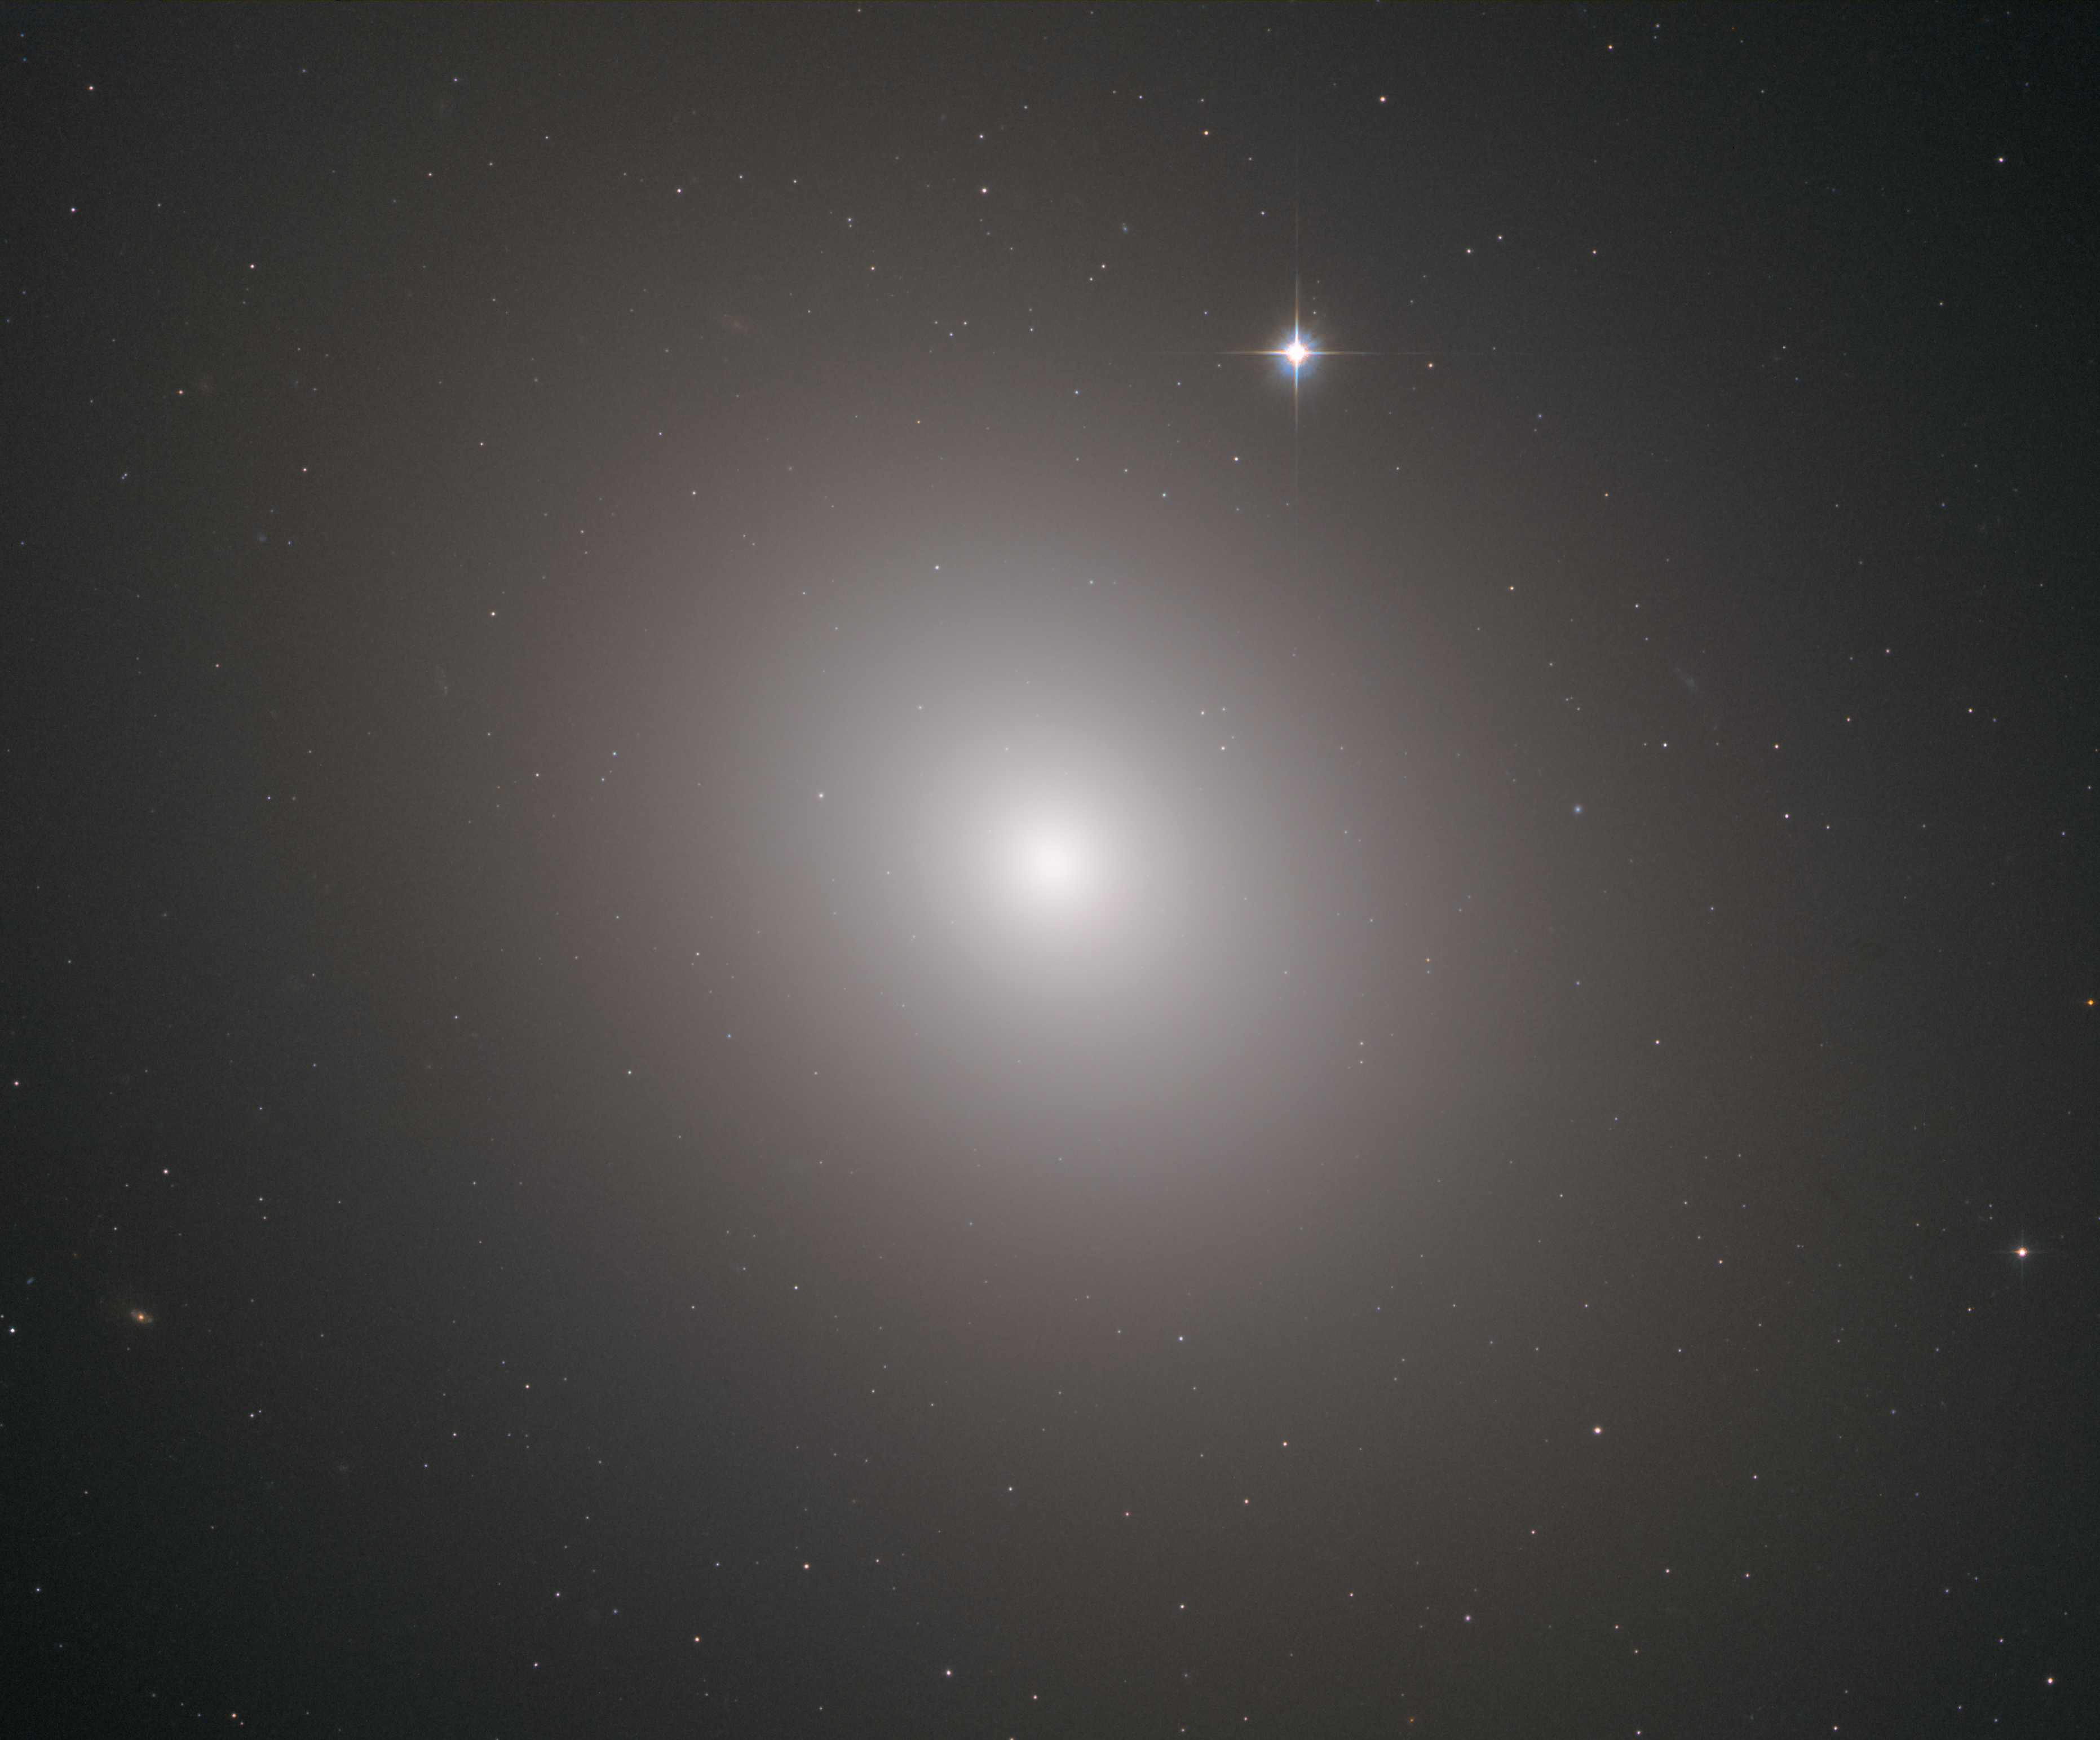

Invisible X-rays

This fuzzy orb of light is a giant elliptical galaxy filled with an incredible 200 billion stars. Unlike spiral galaxies, which have a well-defined structure and boast picturesque spiral arms, elliptical galaxies appear fairly smooth and featureless. This is likely why this galaxy, named Messier 49, was discovered by French astronomer Charles Messier in 1771. At a distance of 56 million light-years, and measuring 157 000 light-years across, M49 was the first member of the Virgo Cluster of galaxies to be discovered, and it is more luminous than any other galaxy at its distance or nearer.

Elliptical galaxies tend to contain a larger portion of older stars than spiral galaxies and also lack young blue stars. Messier 49 itself is very yellow, which indicates that the stars within it are mostly older and redder than the Sun. In fact, the last major episode of star formation was about six billion years ago — before the Sun was even born!

Messier 49 is also rich in globular clusters; it hosts about 6000, a number that dwarfs the 150 found in and around the Milky Way. On average, these clusters are 10 billion years old. Messier 49 is also known to host a supermassive black hole at its centre with the mass of more than 500 million Suns, identifiable by the X-rays pouring out from the heart of the galaxy (as this Hubble image comprises infrared observations, these X-rays are not visible here).

Credit: ESA/Hubble & NASA, J. Blakenslee, P Cote et al.